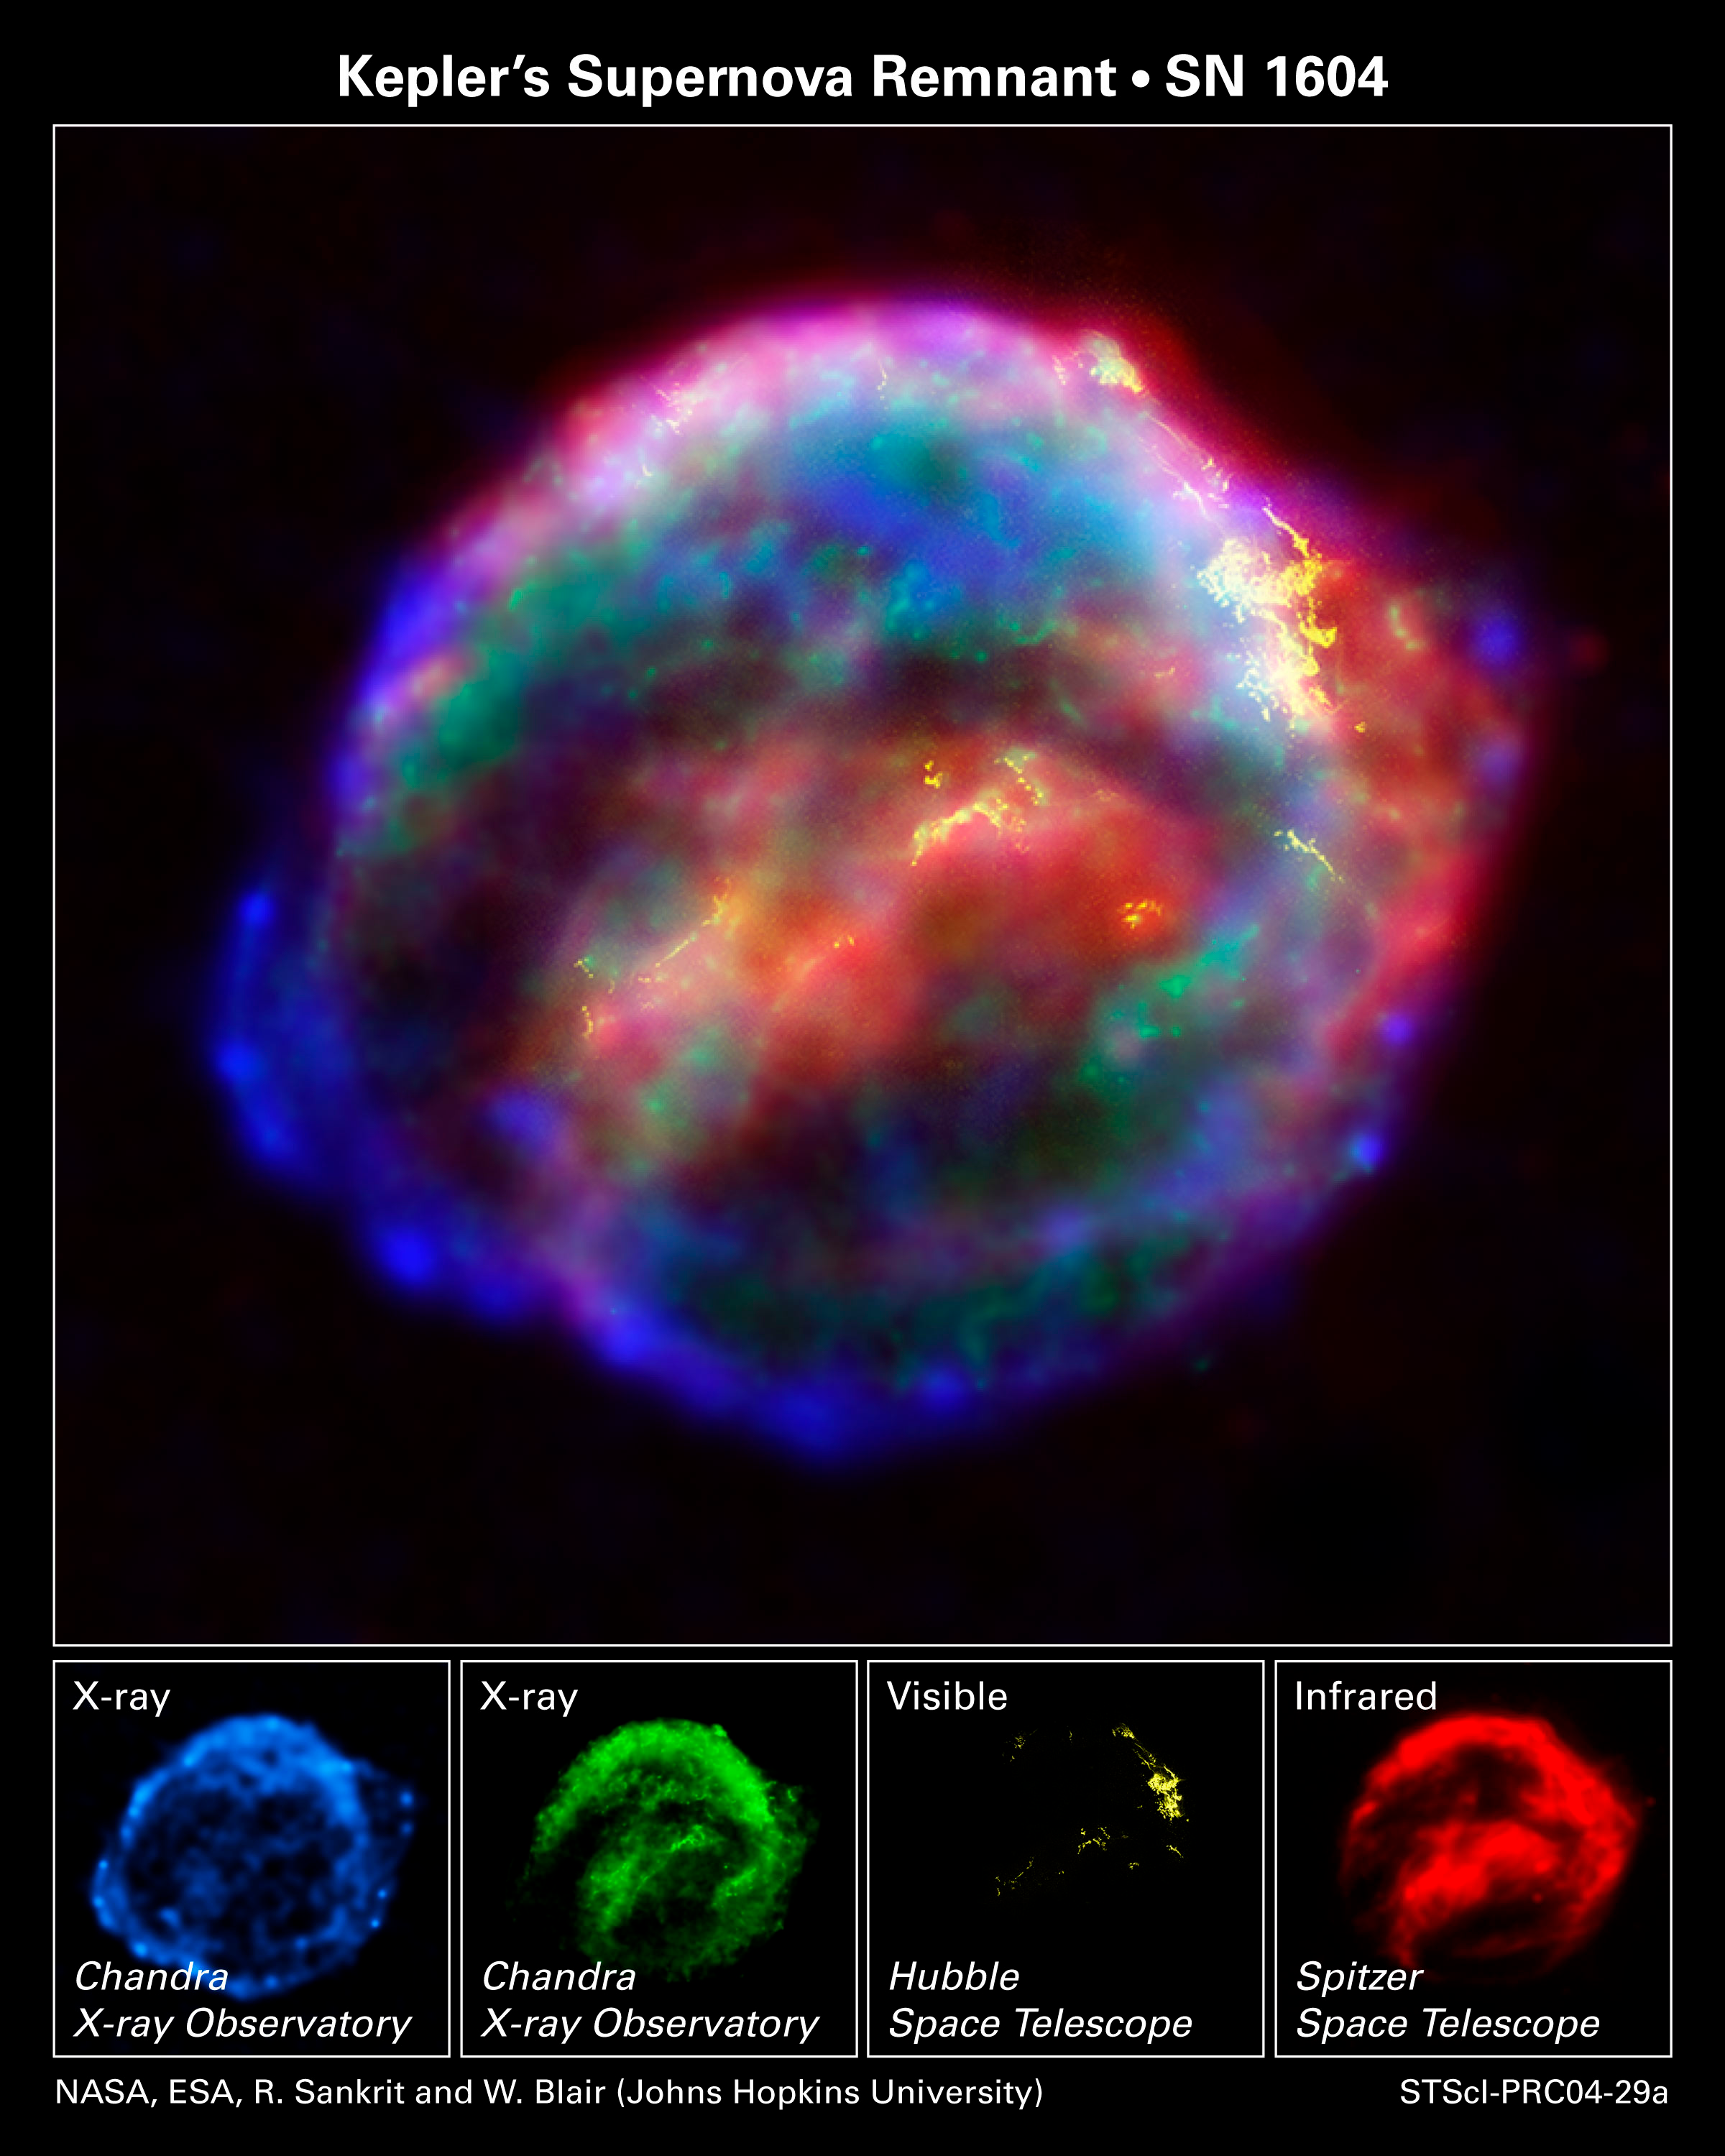

NASA's Great Observatories Provide a Detailed View of Kepler's Supernova Remnant

NASA's three Great Observatories - the Hubble Space Telescope, the Spitzer Space Telescope, and the Chandra X-ray Observatory - joined forces to probe the expanding remains of a supernova, called Kepler's supernova remnant, first seen 400 years ago by sky watchers, including famous astronomer Johannes Kepler.

The combined image unveils a bubble-shaped shroud of gas and dust that is 14 light-years wide and is expanding at 4 million miles per hour (2,000 kilometers per second). Observations from each telescope highlight distinct features of the supernova remnant, a fast-moving shell of iron-rich material from the exploded star, surrounded by an expanding shock wave that is sweeping up interstellar gas and dust.

Credit: NASA, ESA, R. Sankrit and W. Blair (Johns Hopkins University)